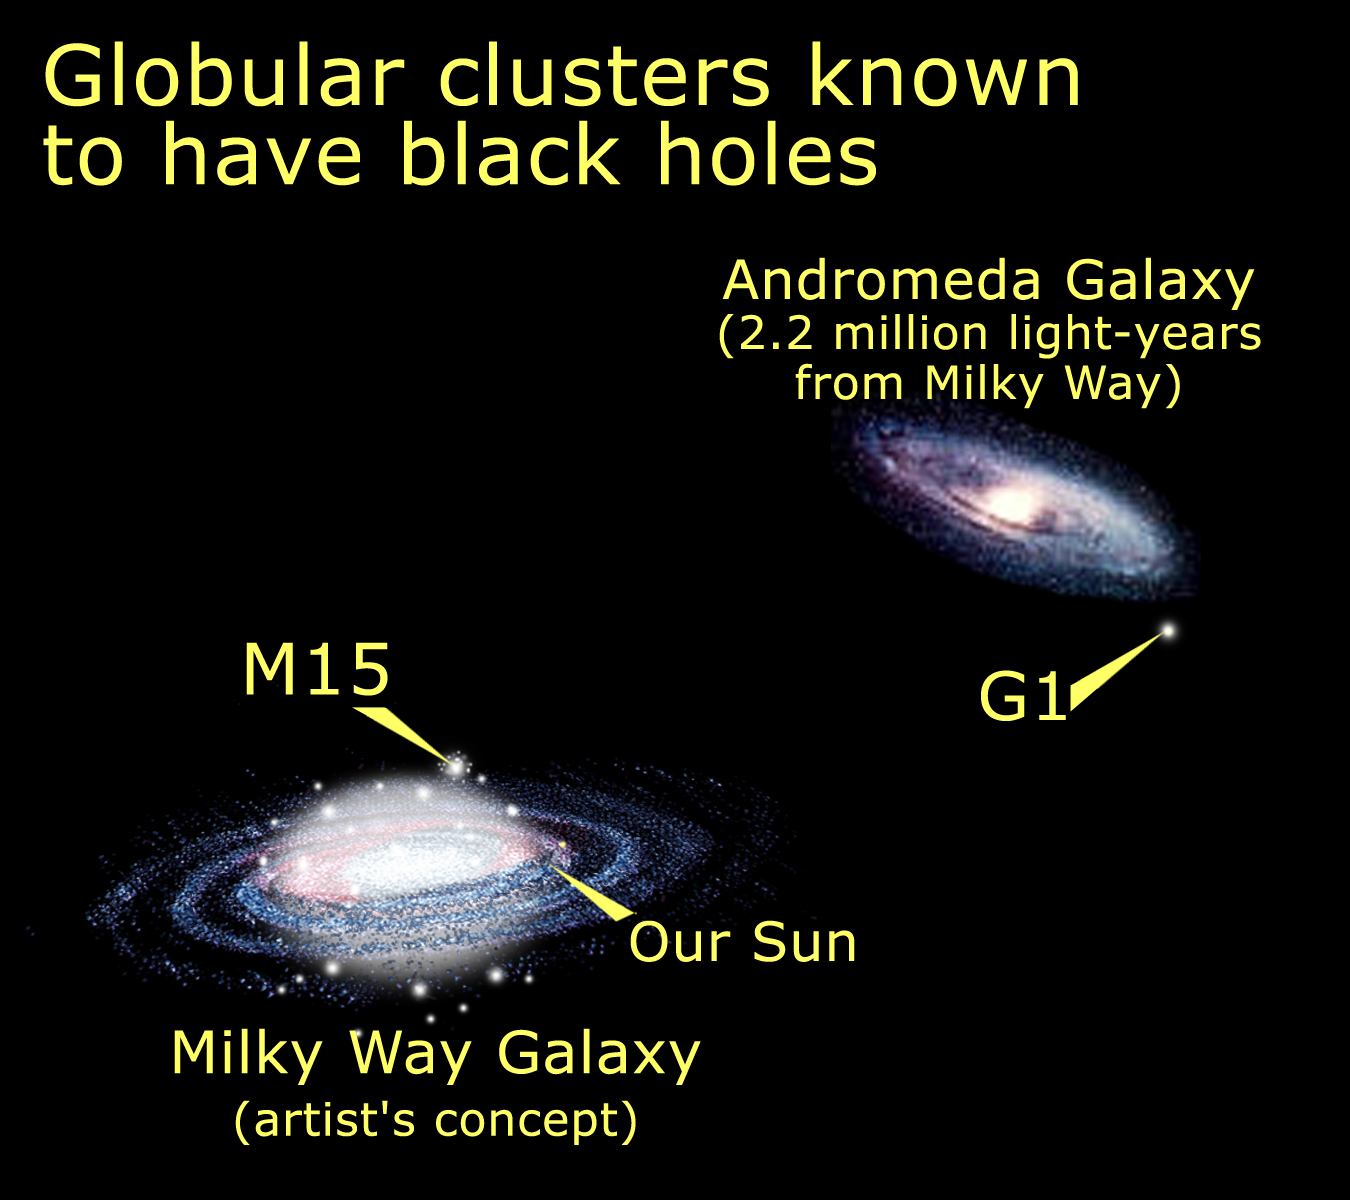

Relative location of M15 and M31 G1

Medium-size black holes actually do exist, according to the latest findings from NASA/ESA Hubble Space Telescope, but scientists had to look in some unexpected places to find them. The previously undiscovered black holes provide an important link that sheds light on the way in which black holes grow. Even more odd, these new black holes were found in the cores of glittering, 'beehive' swarms of stars called globular star clusters, which orbit our Milky Way and other galaxies. The black hole in globular cluster M15 is 4, 000 times more massive than our Sun. G1, a much larger globular cluster, harbors a heftier black hole, about 20, 000 times more massive than our Sun.

Credit: NASA/ESA and A. Feild (STScI)